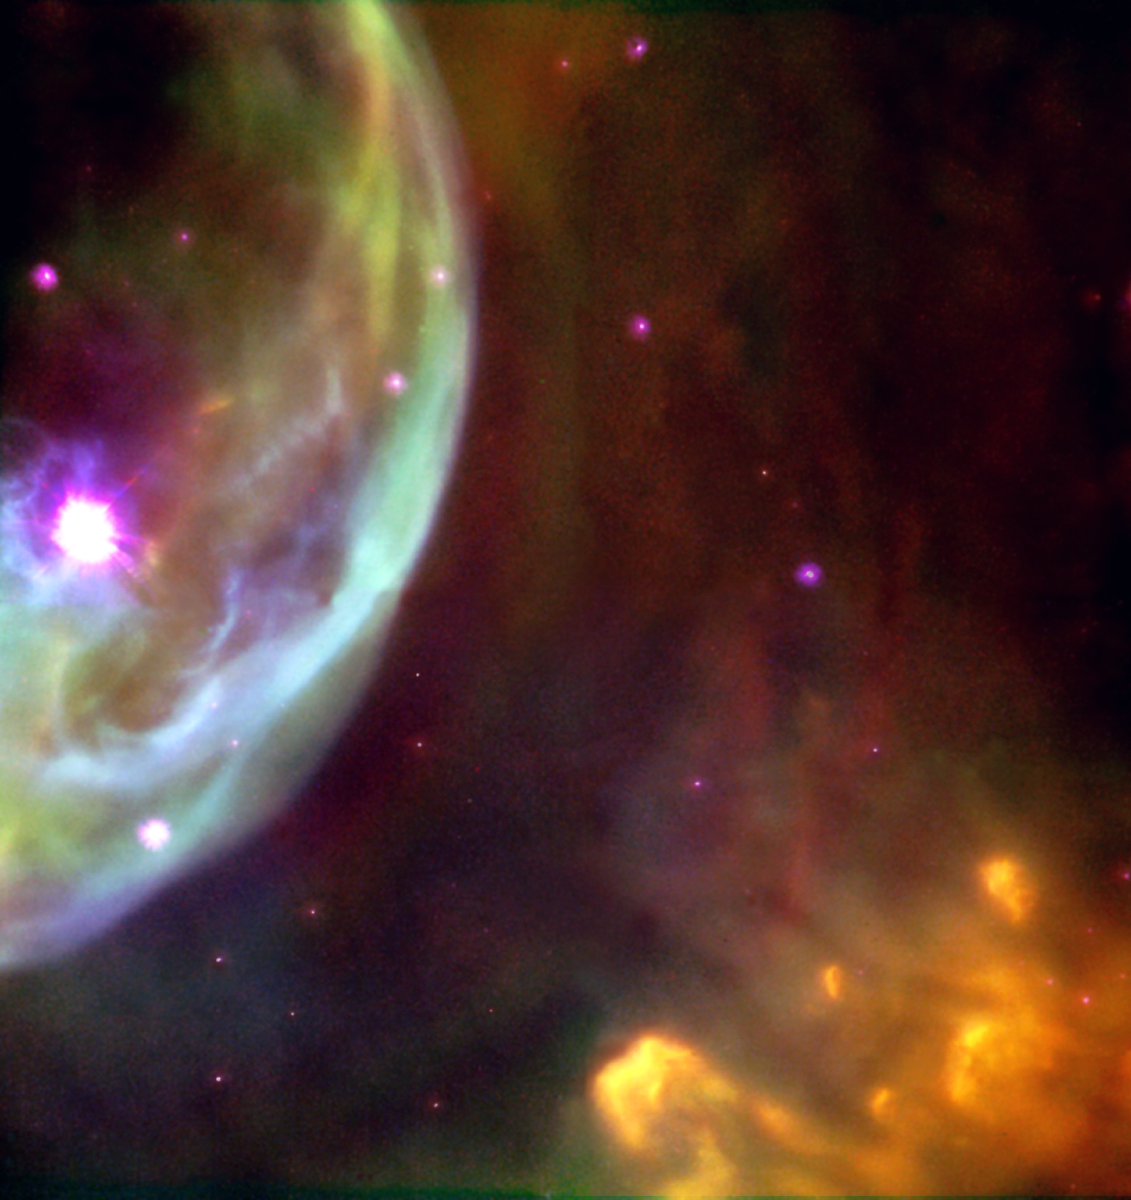

Blowing cosmic bubbles

This NASA/ESA Hubble Space Telescope image reveals an expanding shell of glowing gas surrounding a hot, massive star in our Milky Way Galaxy. The shell is being shaped by strong stellar winds of material and radiation produced by the bright star at the left, which is 10 to 20 times more massive than our Sun.

Credit: Hubble Heritage Team (AURA/STScI/NASA/ESA)